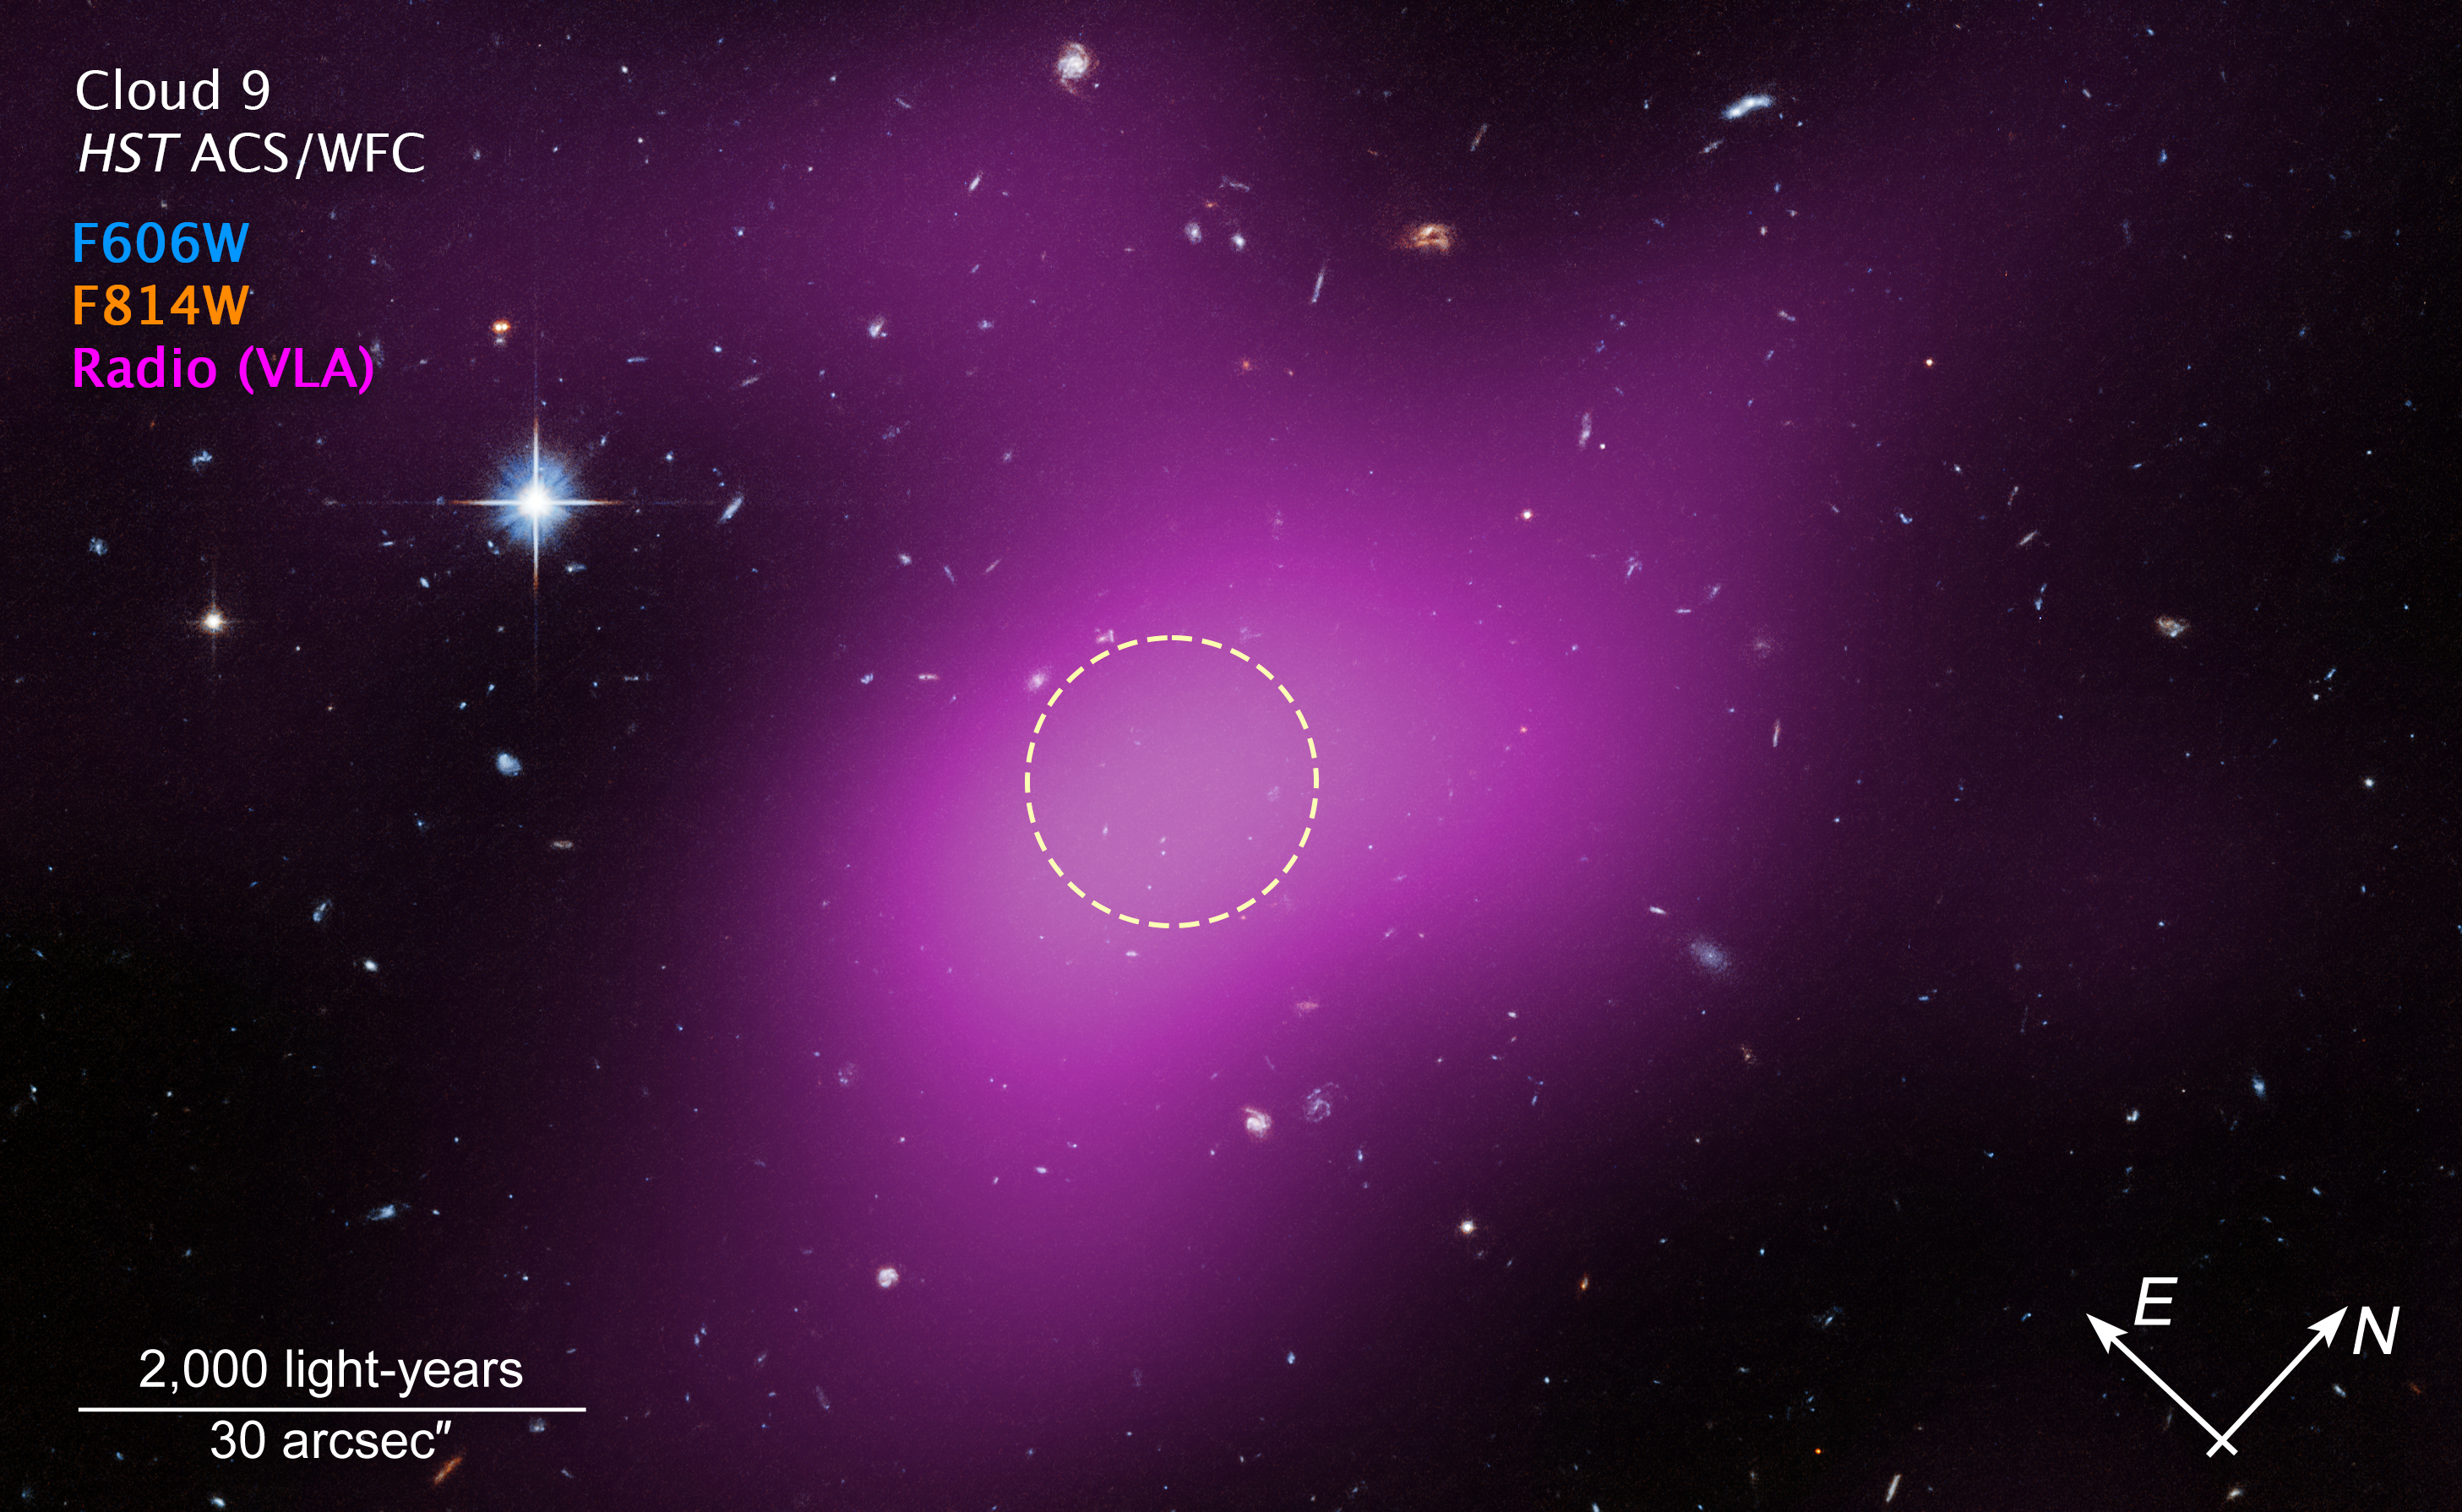

Location of Cloud-9

This image shows the location of Cloud-9. The diffuse magenta is radio data from the ground-based Very Large Array (VLA) showing the presence of the cloud. The dashed circle marks the peak of radio emission,which is where researchers focused their search for stars. Follow-up observations by the NASA/ESA Hubble Space Telescope’s Advanced Camera for Surveys found no stars within the cloud. The few objects that appear within its boundaries are background galaxies. Before the Hubble observations, scientists could argue that Cloud-9 is a faint dwarf galaxy whose stars could not be seen with ground-based telescopes due to the lack of sensitivity. Hubble’s Advanced Camera for Surveys shows that, in reality, the failed galaxy contains no stars.

Credit: NASA, ESA. G. Anand (STScI), and A. Benitez-Llambay (Univ. of Milan-Bicocca); Image processing: J. DePasquale (STScI)